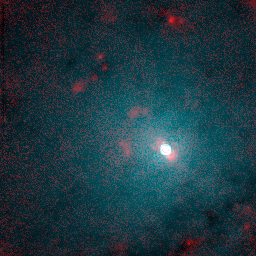

Centaurus A Nucleus

Hubble's Near Infrared Camera and Multi-Object Spectrometer was used to peer past the dust to discover a tilted disk of hot gas at the galaxy's center (white bar running diagonally across image center). This 130 light-year diameter disk encircles a suspected black hole which may be one billion times the mass of our Sun. The disk feeds material to presumably an inner, unresolved accretion disk that is made up of gas entrapped by the black hole. The red blobs near the disk are glowing gas clouds which have been heated up and ionized by the powerful radiation from the active nucleus.

Credit: E.J. Schreier, (STScI) and NASA/ESA